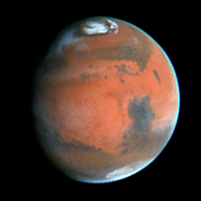

Mars Heading Towards Autumn as Mars Global Surveyor Begins Aerobraking

An image of this region of Mars, taken in June 1997, is shown for comparison. The Hellas basin is filled with bright clouds and/or surface frost. More water ice clouds are visible across the planet than in the September image, reflecting the effects of the changing season. Mars appears larger because it was 44 million miles (77 million kilometers) closer to Earth than in the September image.

Credit: Phil James (Univ. Toledo) and Steve Lee (Univ. Colorado), and NASA/ESA